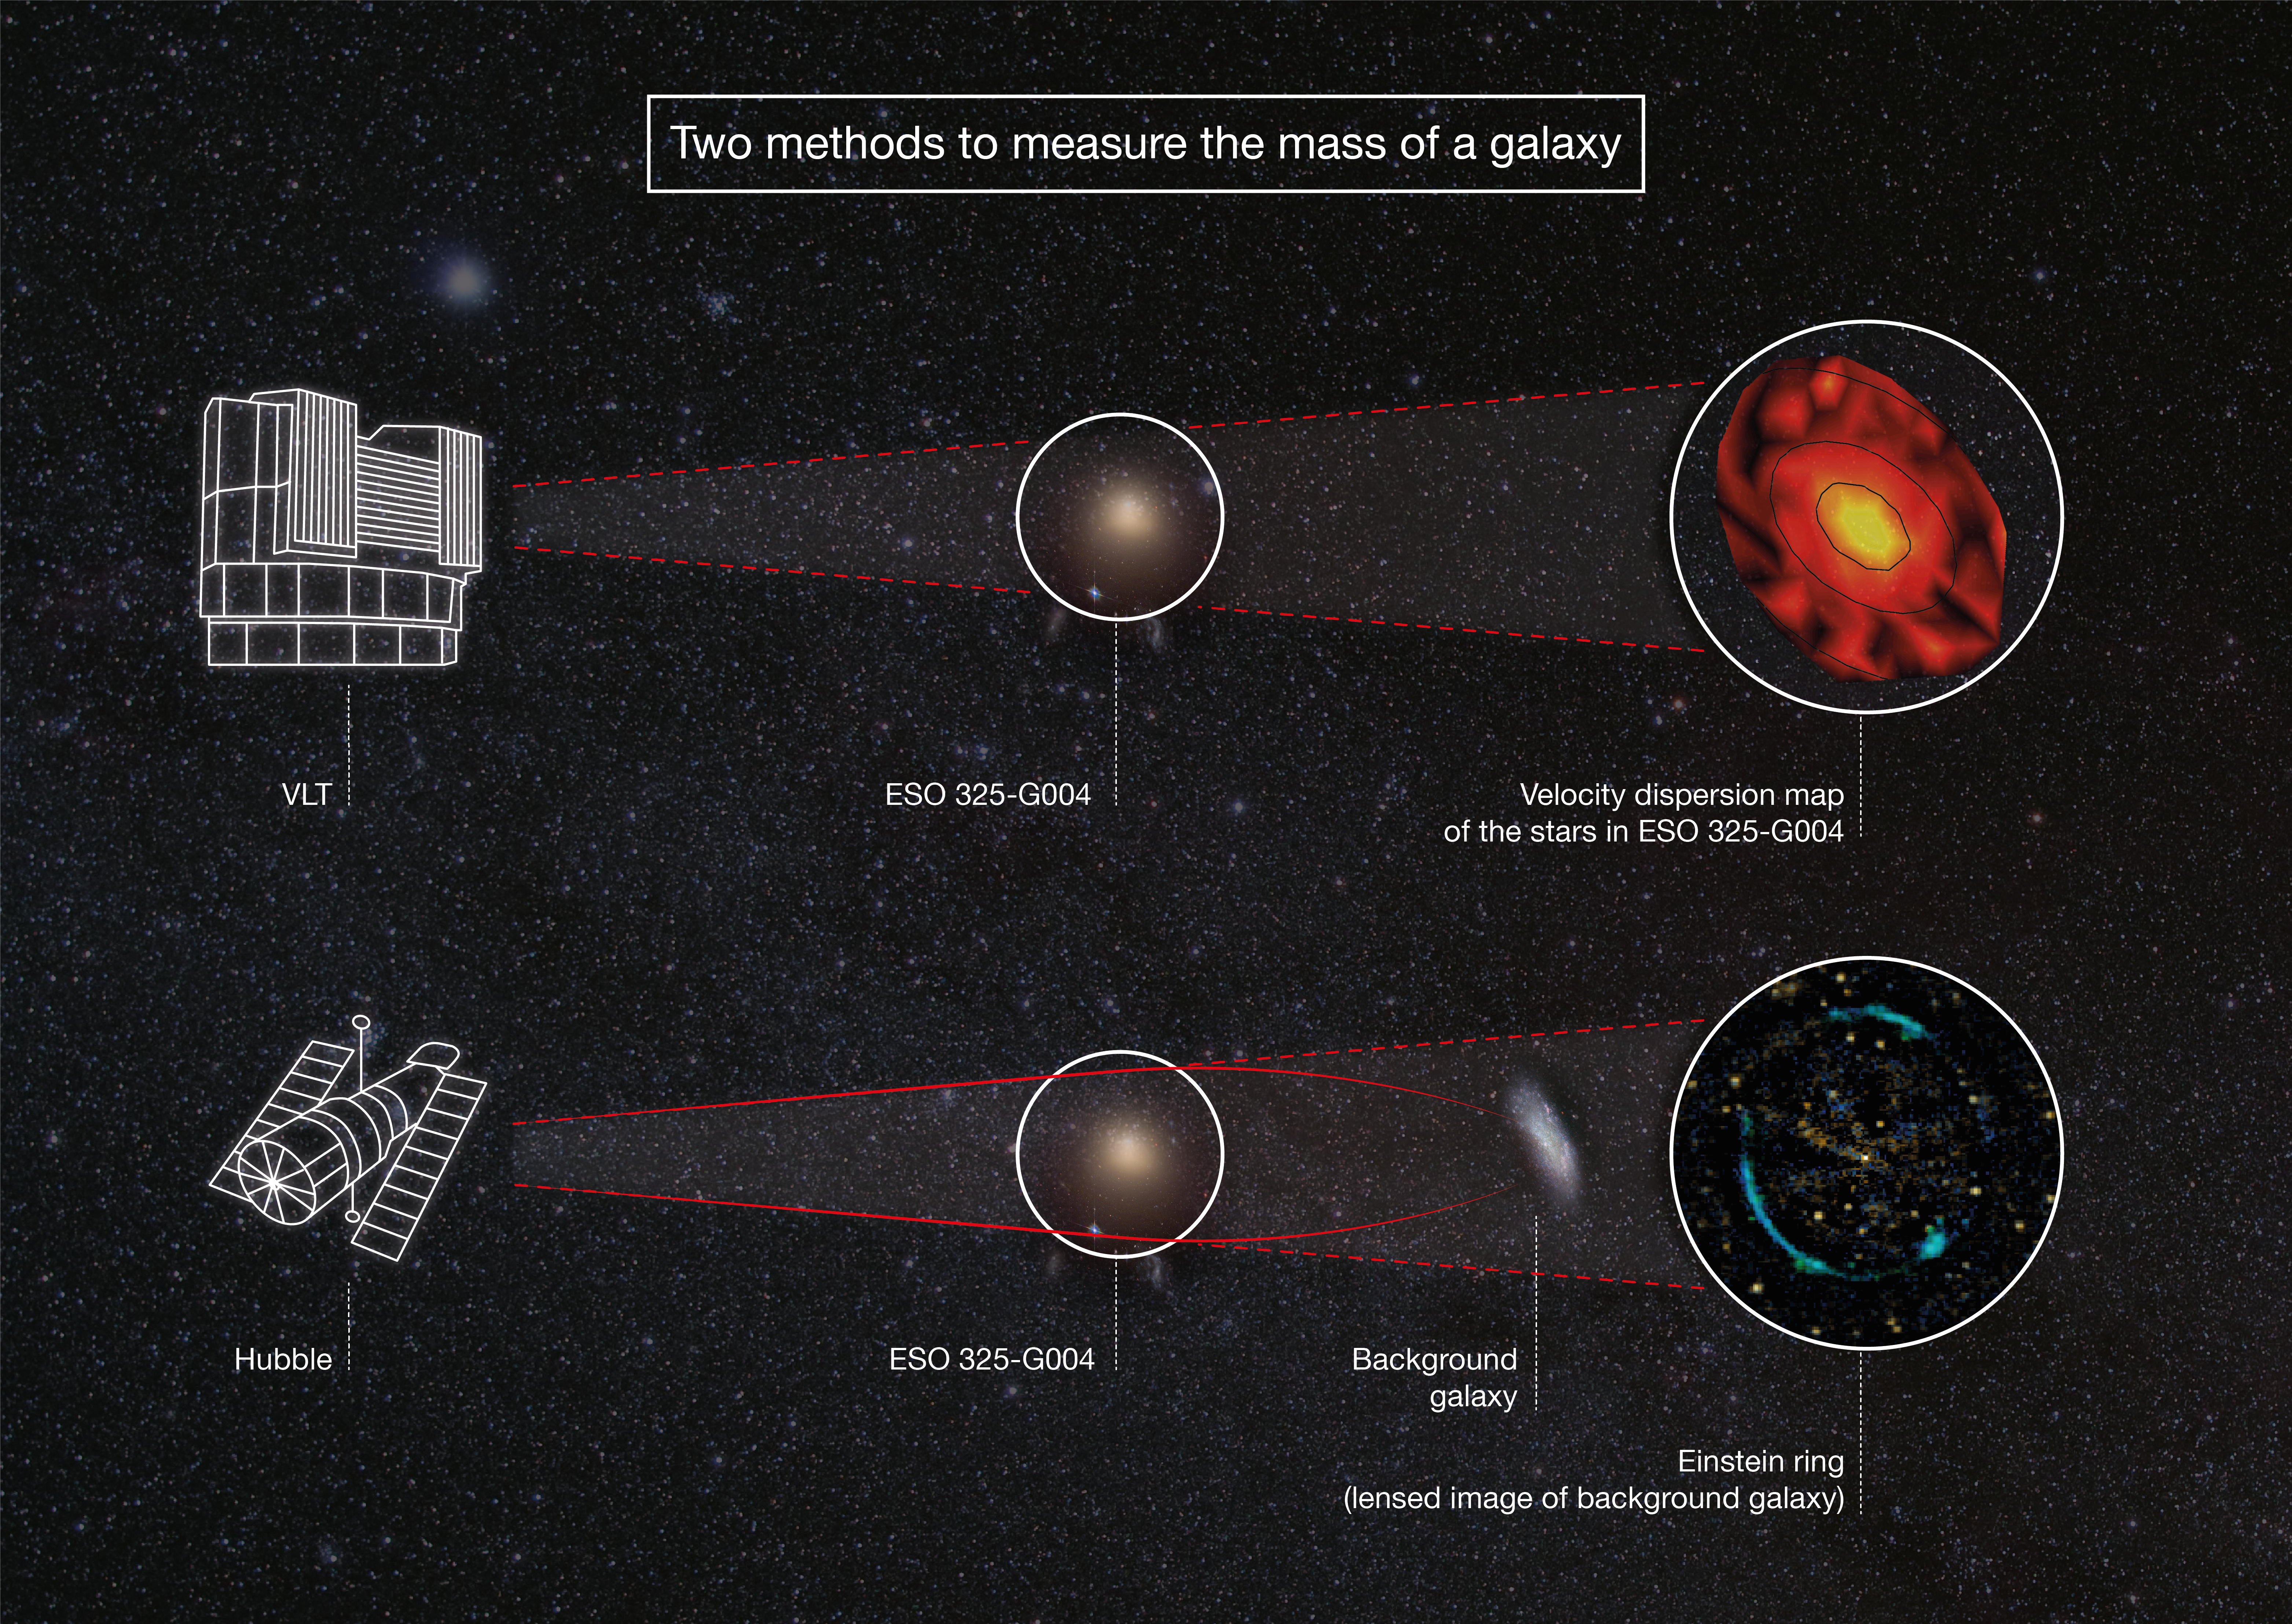

Two methods of measuring the mass of a galaxy

This infographic compares the two methods used to measure the mass of the galaxy ESO 325-G004. The first method used ESO’s Very Large Telescope to measure the velocities of stars in ESO 325-G004. The second method used the NASA/ESA Hubble Space Telescope to observe an Einstein ring caused by light from a background galaxy being bent and distorted by ESO 325-G004. By comparing these two methods of measuring the strength of the gravity of ESO 325-G004, it was determined that Einstein’s general theory of relativity works on extragalactic scales — something that had not been previously tested.

Credit: ESA/Hubble, ESO, NASA